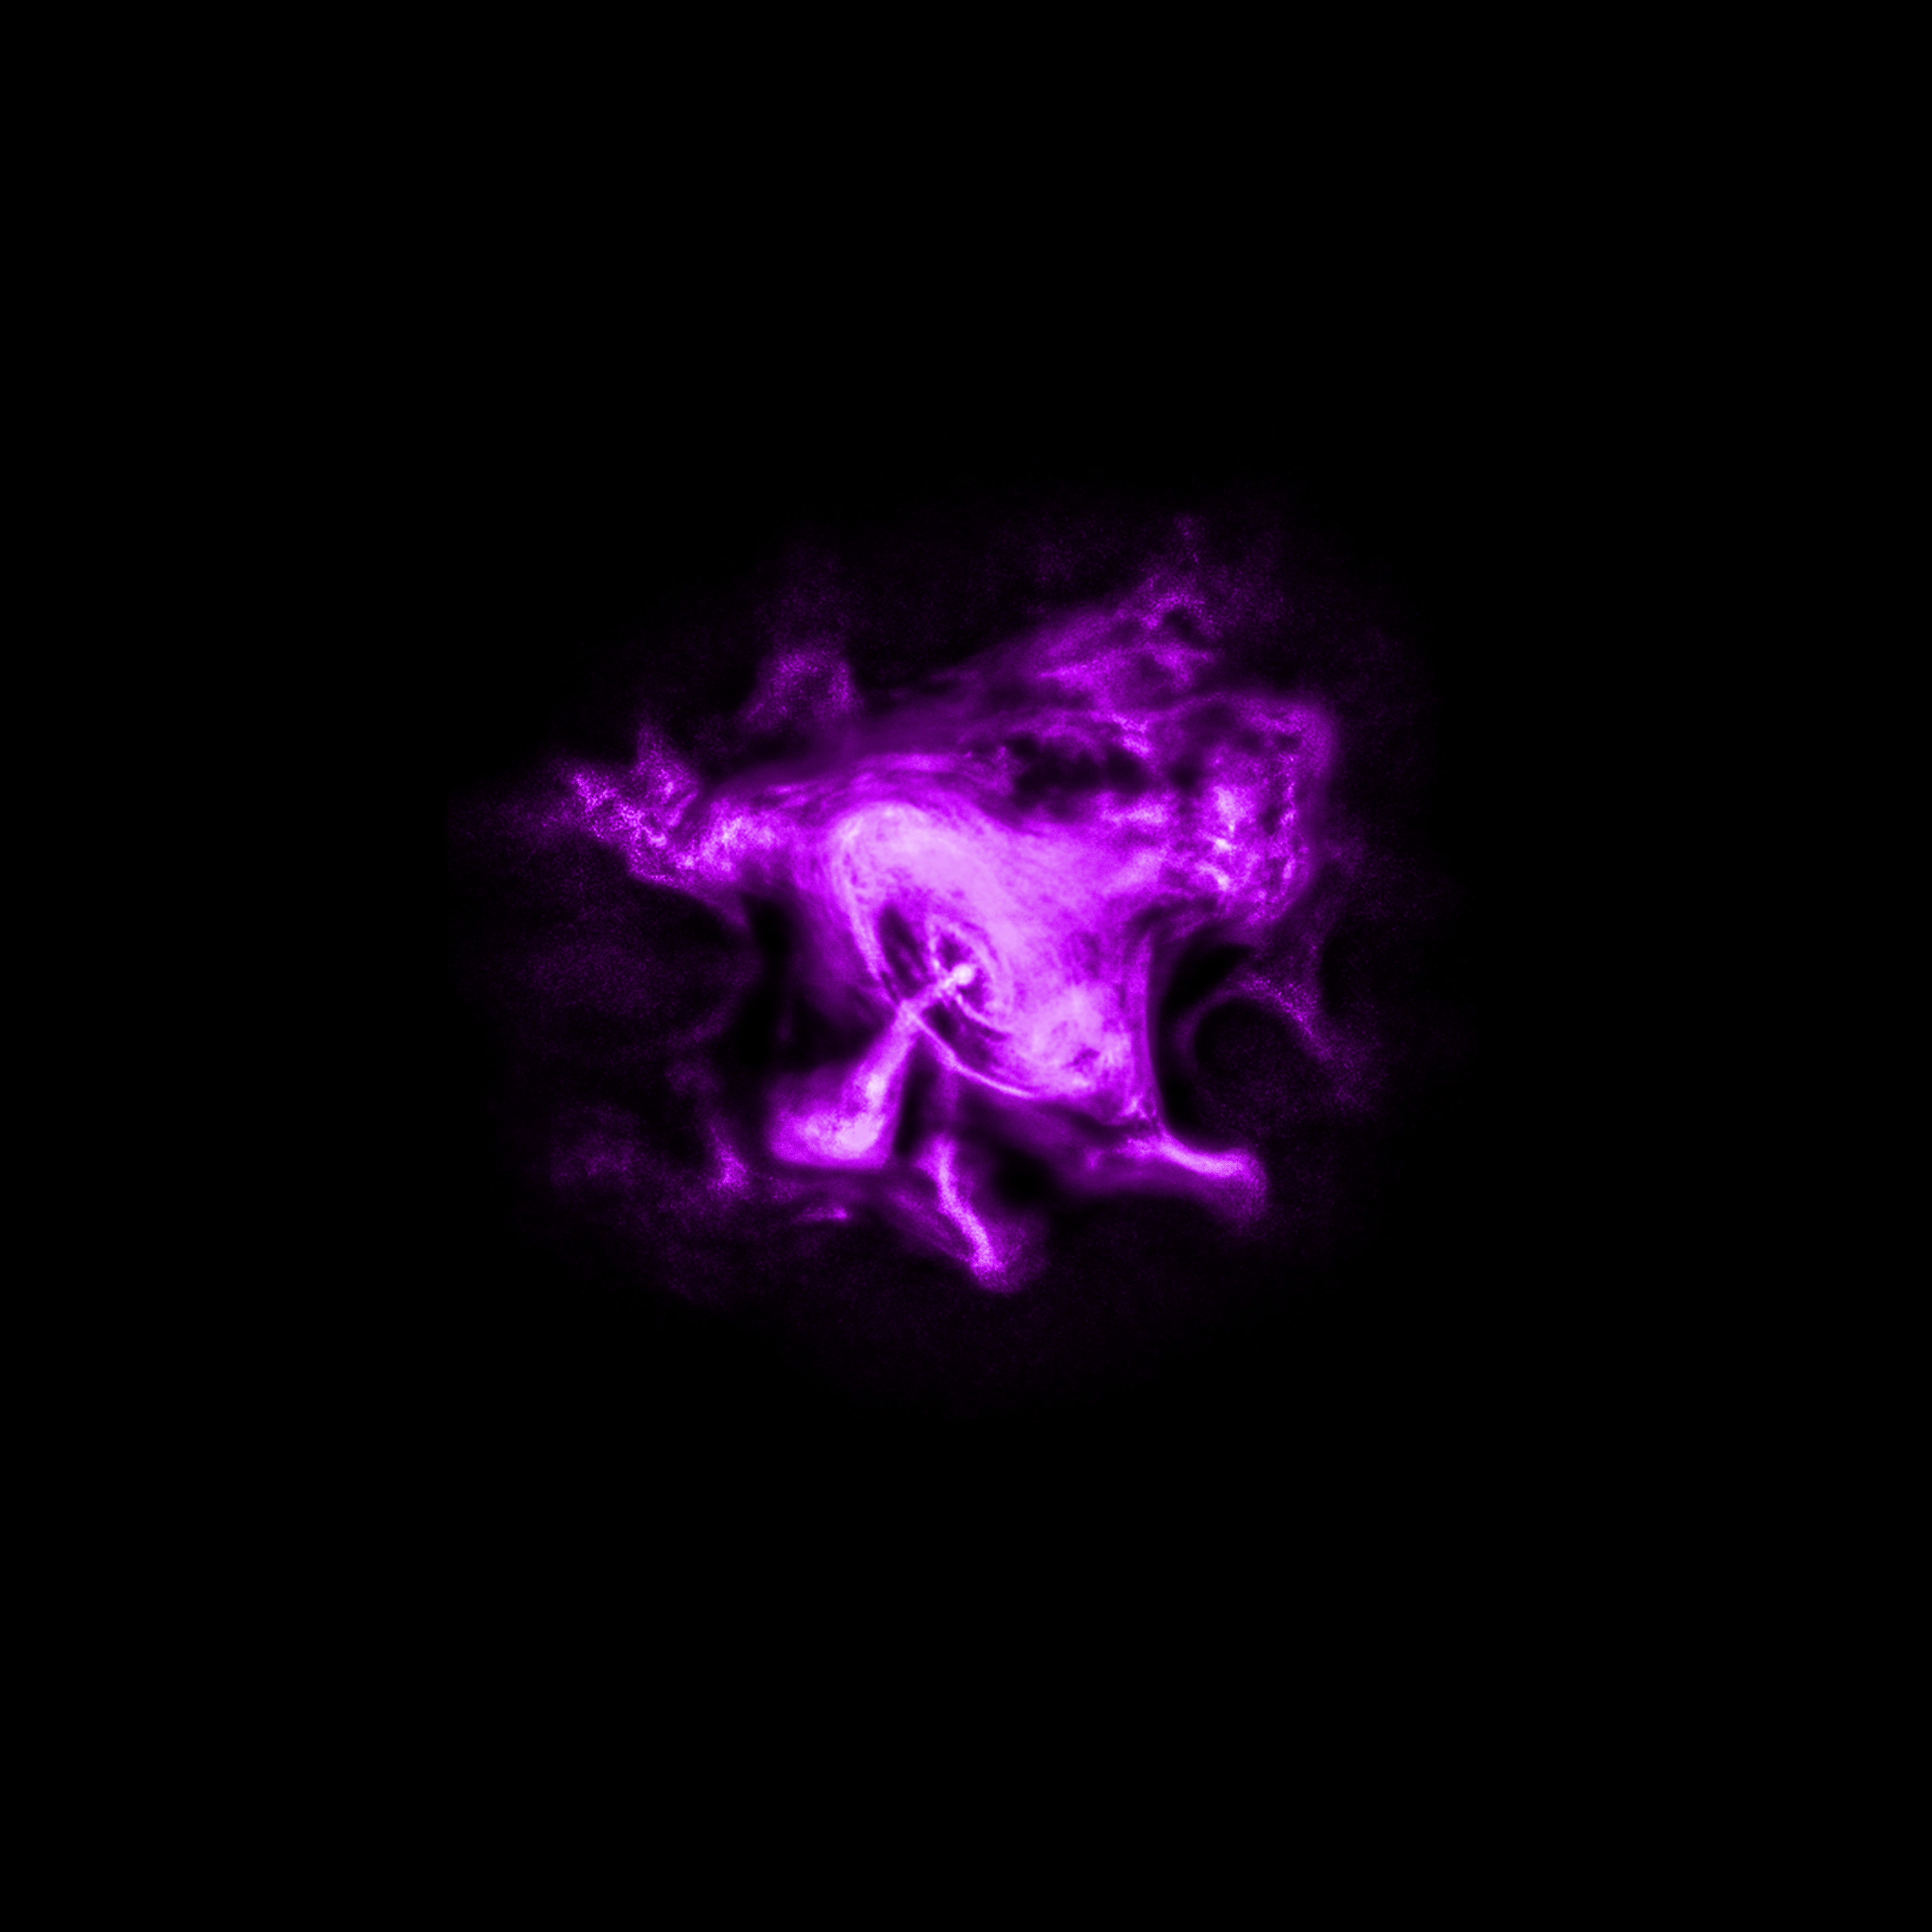

Chandra X-ray Observatory (X-ray) Image of the Crab Nebula

NASA’s Chandra X-ray Observatory observed X-ray emissions from the Crab Nebula, a supernova remnant located 6500 light-years from Earth.

Credit: CXC